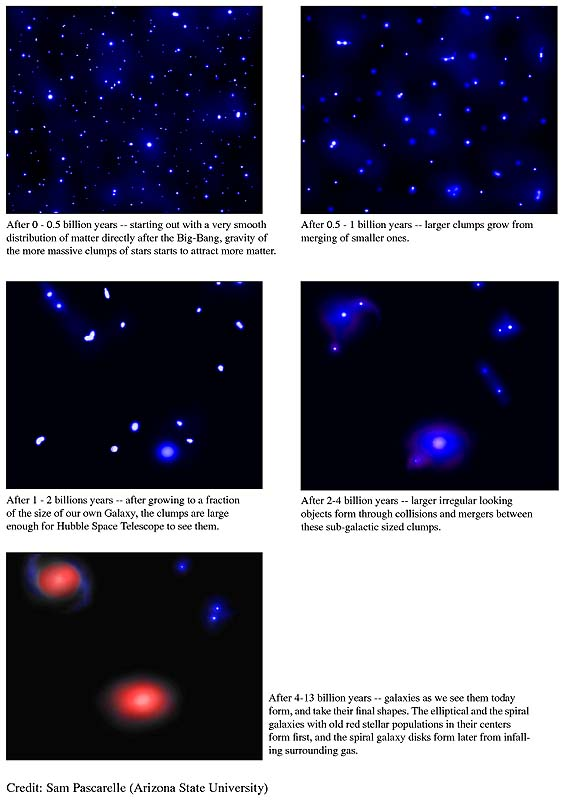

History of star formation

This is a series of illustrations and text that starts with the Big Bang and then continues to explain how galaxies started to take form.

Credit: Sam Pascarelle (Arizona State University)